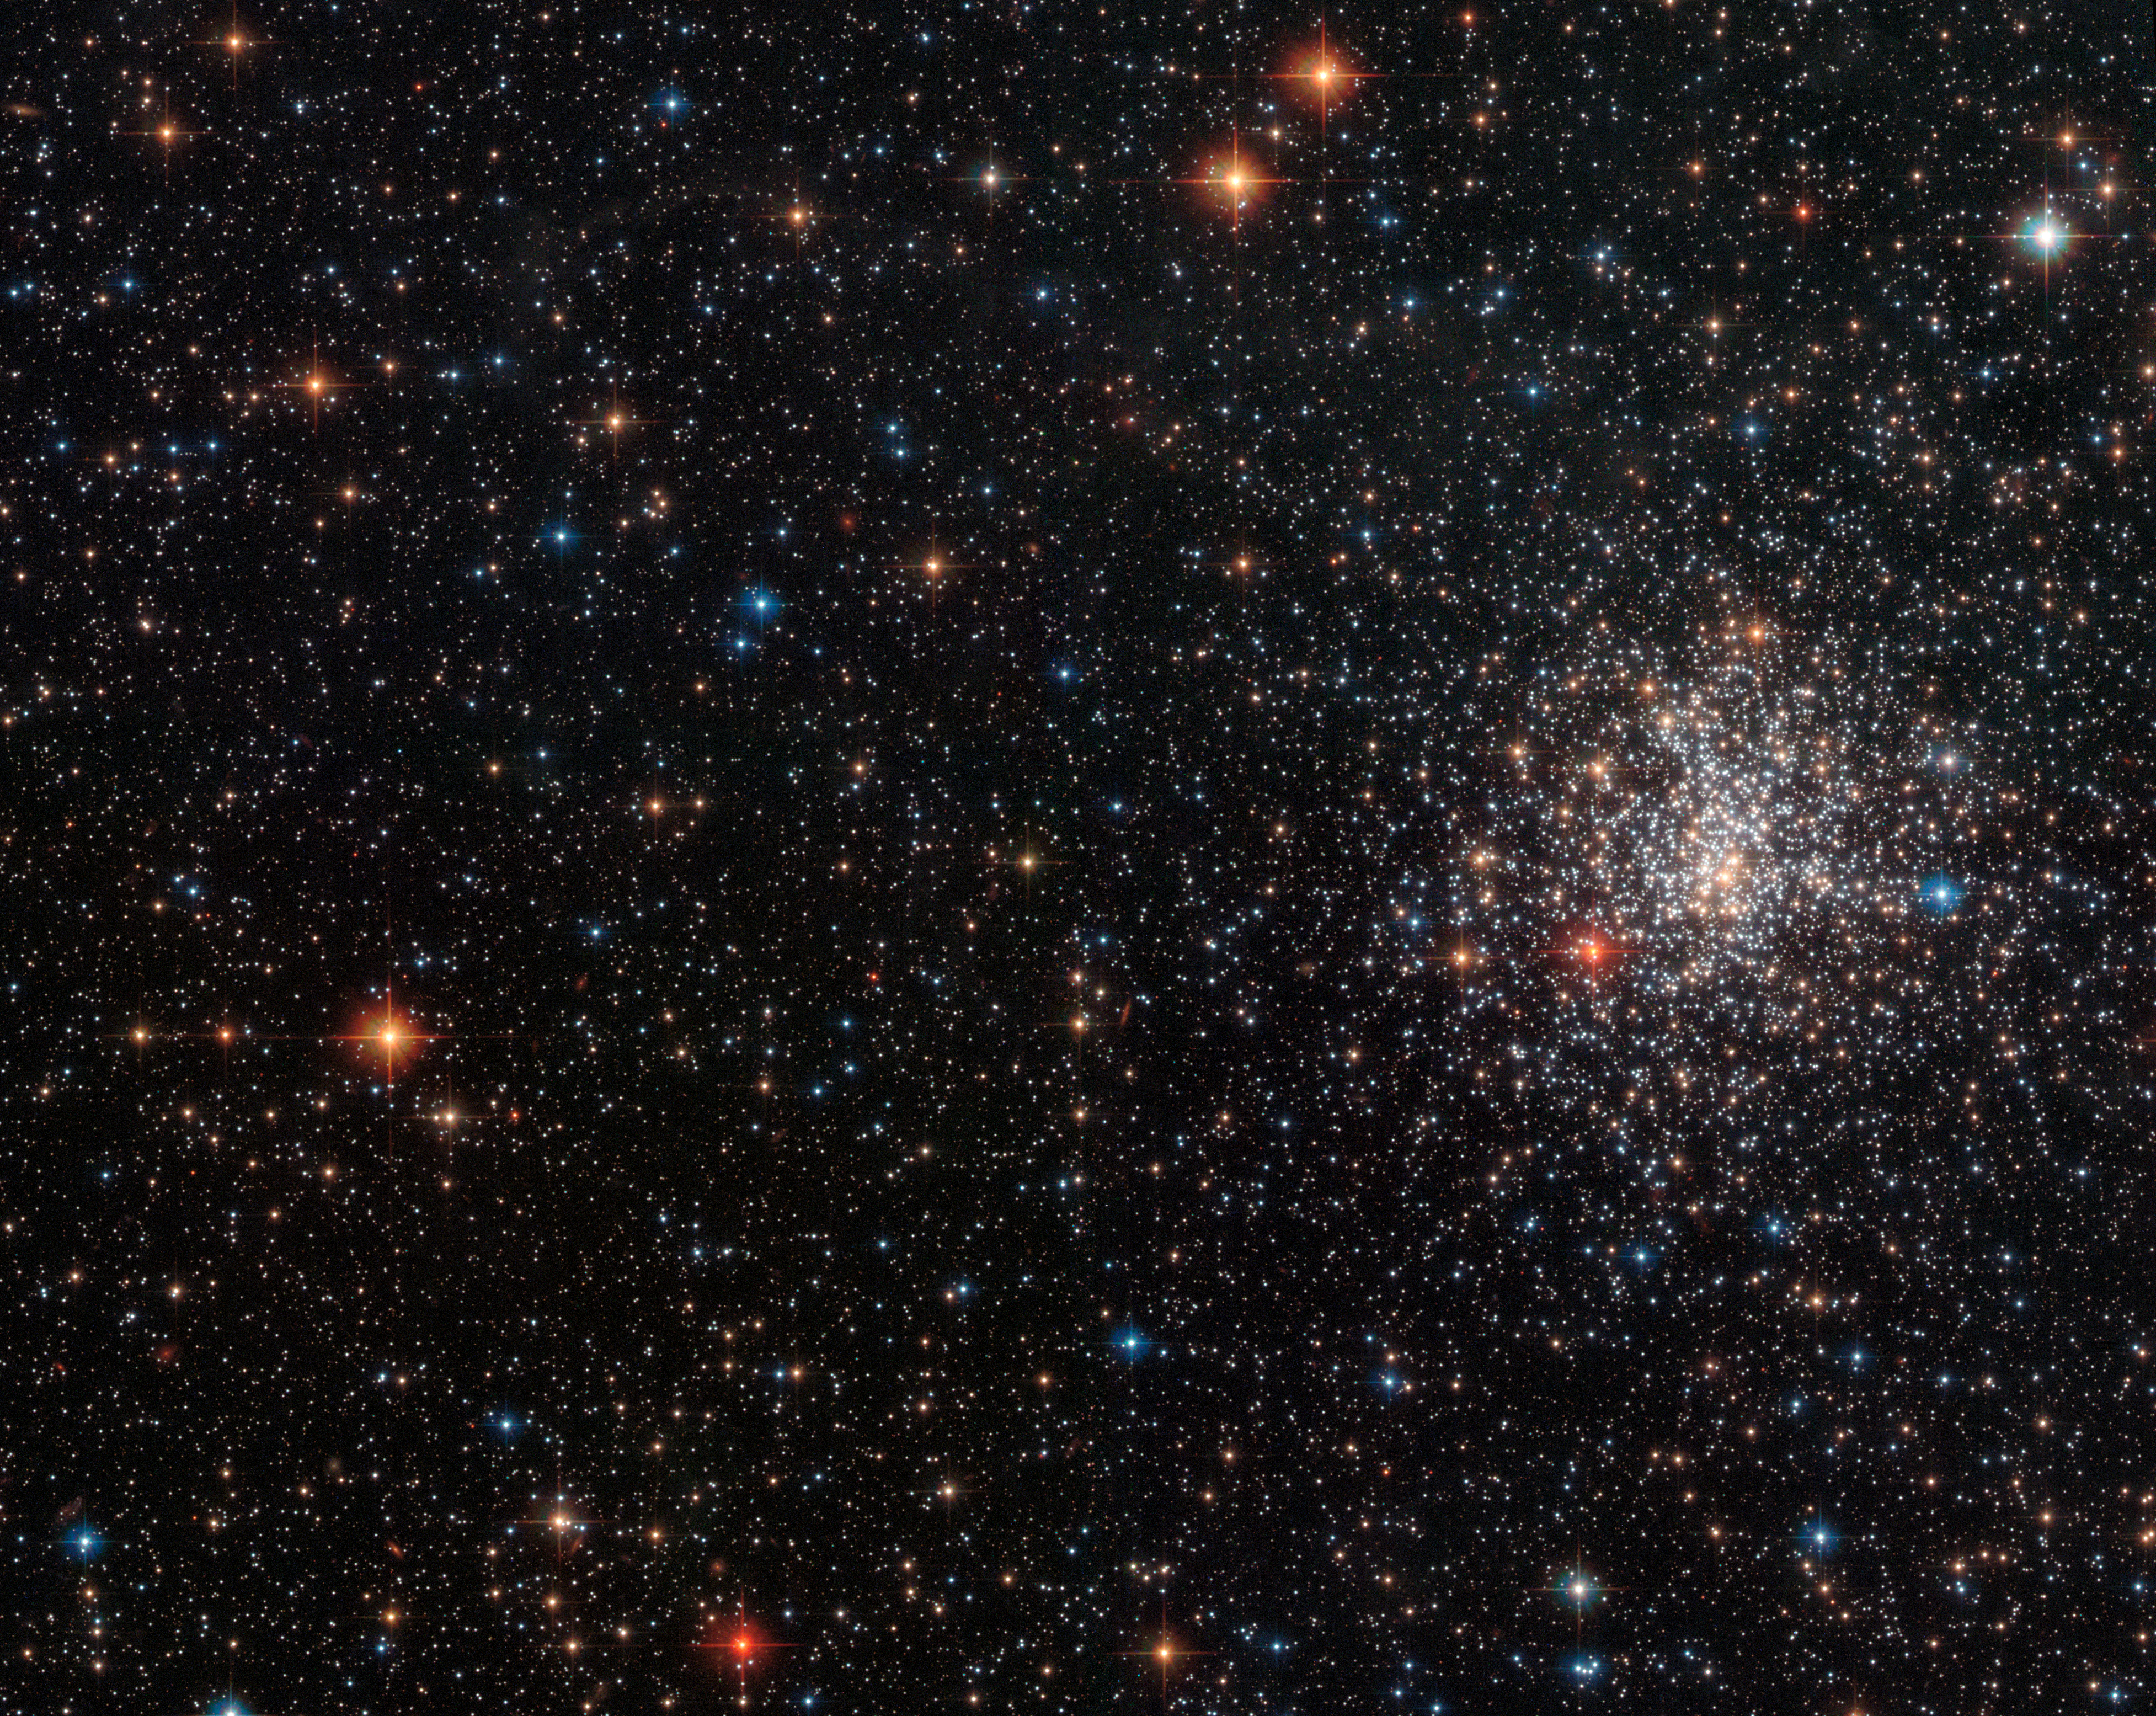

A globular cluster’s striking red eye

This Picture of the Week shows the colourful globular cluster NGC 2108. The cluster is nestled within the Large Magellanic Cloud, in the constellation of the Swordfish (Dorado). It was discovered in 1835 by the astronomer, mathematician, chemist and inventor John Herschel, son of the famous William Herschel.

The most striking feature of this globular cluster is the gleaming ruby-red spot at the centre left of the cluster. What looks like the cluster’s watchful eye is actually a carbon star. Carbon stars are almost always cool red giants, with atmospheres containing more carbon than oxygen — the opposite to our Sun. Carbon monoxide forms in the outer layer of the star through a combination of these elements, until there is no more oxygen available. Carbon atoms are then free to form a variety of other carbon compounds, such as C2, CH, CN, C3 and SiC2, which scatter blue light within the star, allowing red light to pass through undisturbed.

This image was captured by the NASA/ESA Hubble Space Telescope’s Advanced Camera for Surveys (ACS), using three different filters.

Credit: ESA/Hubble & NASA